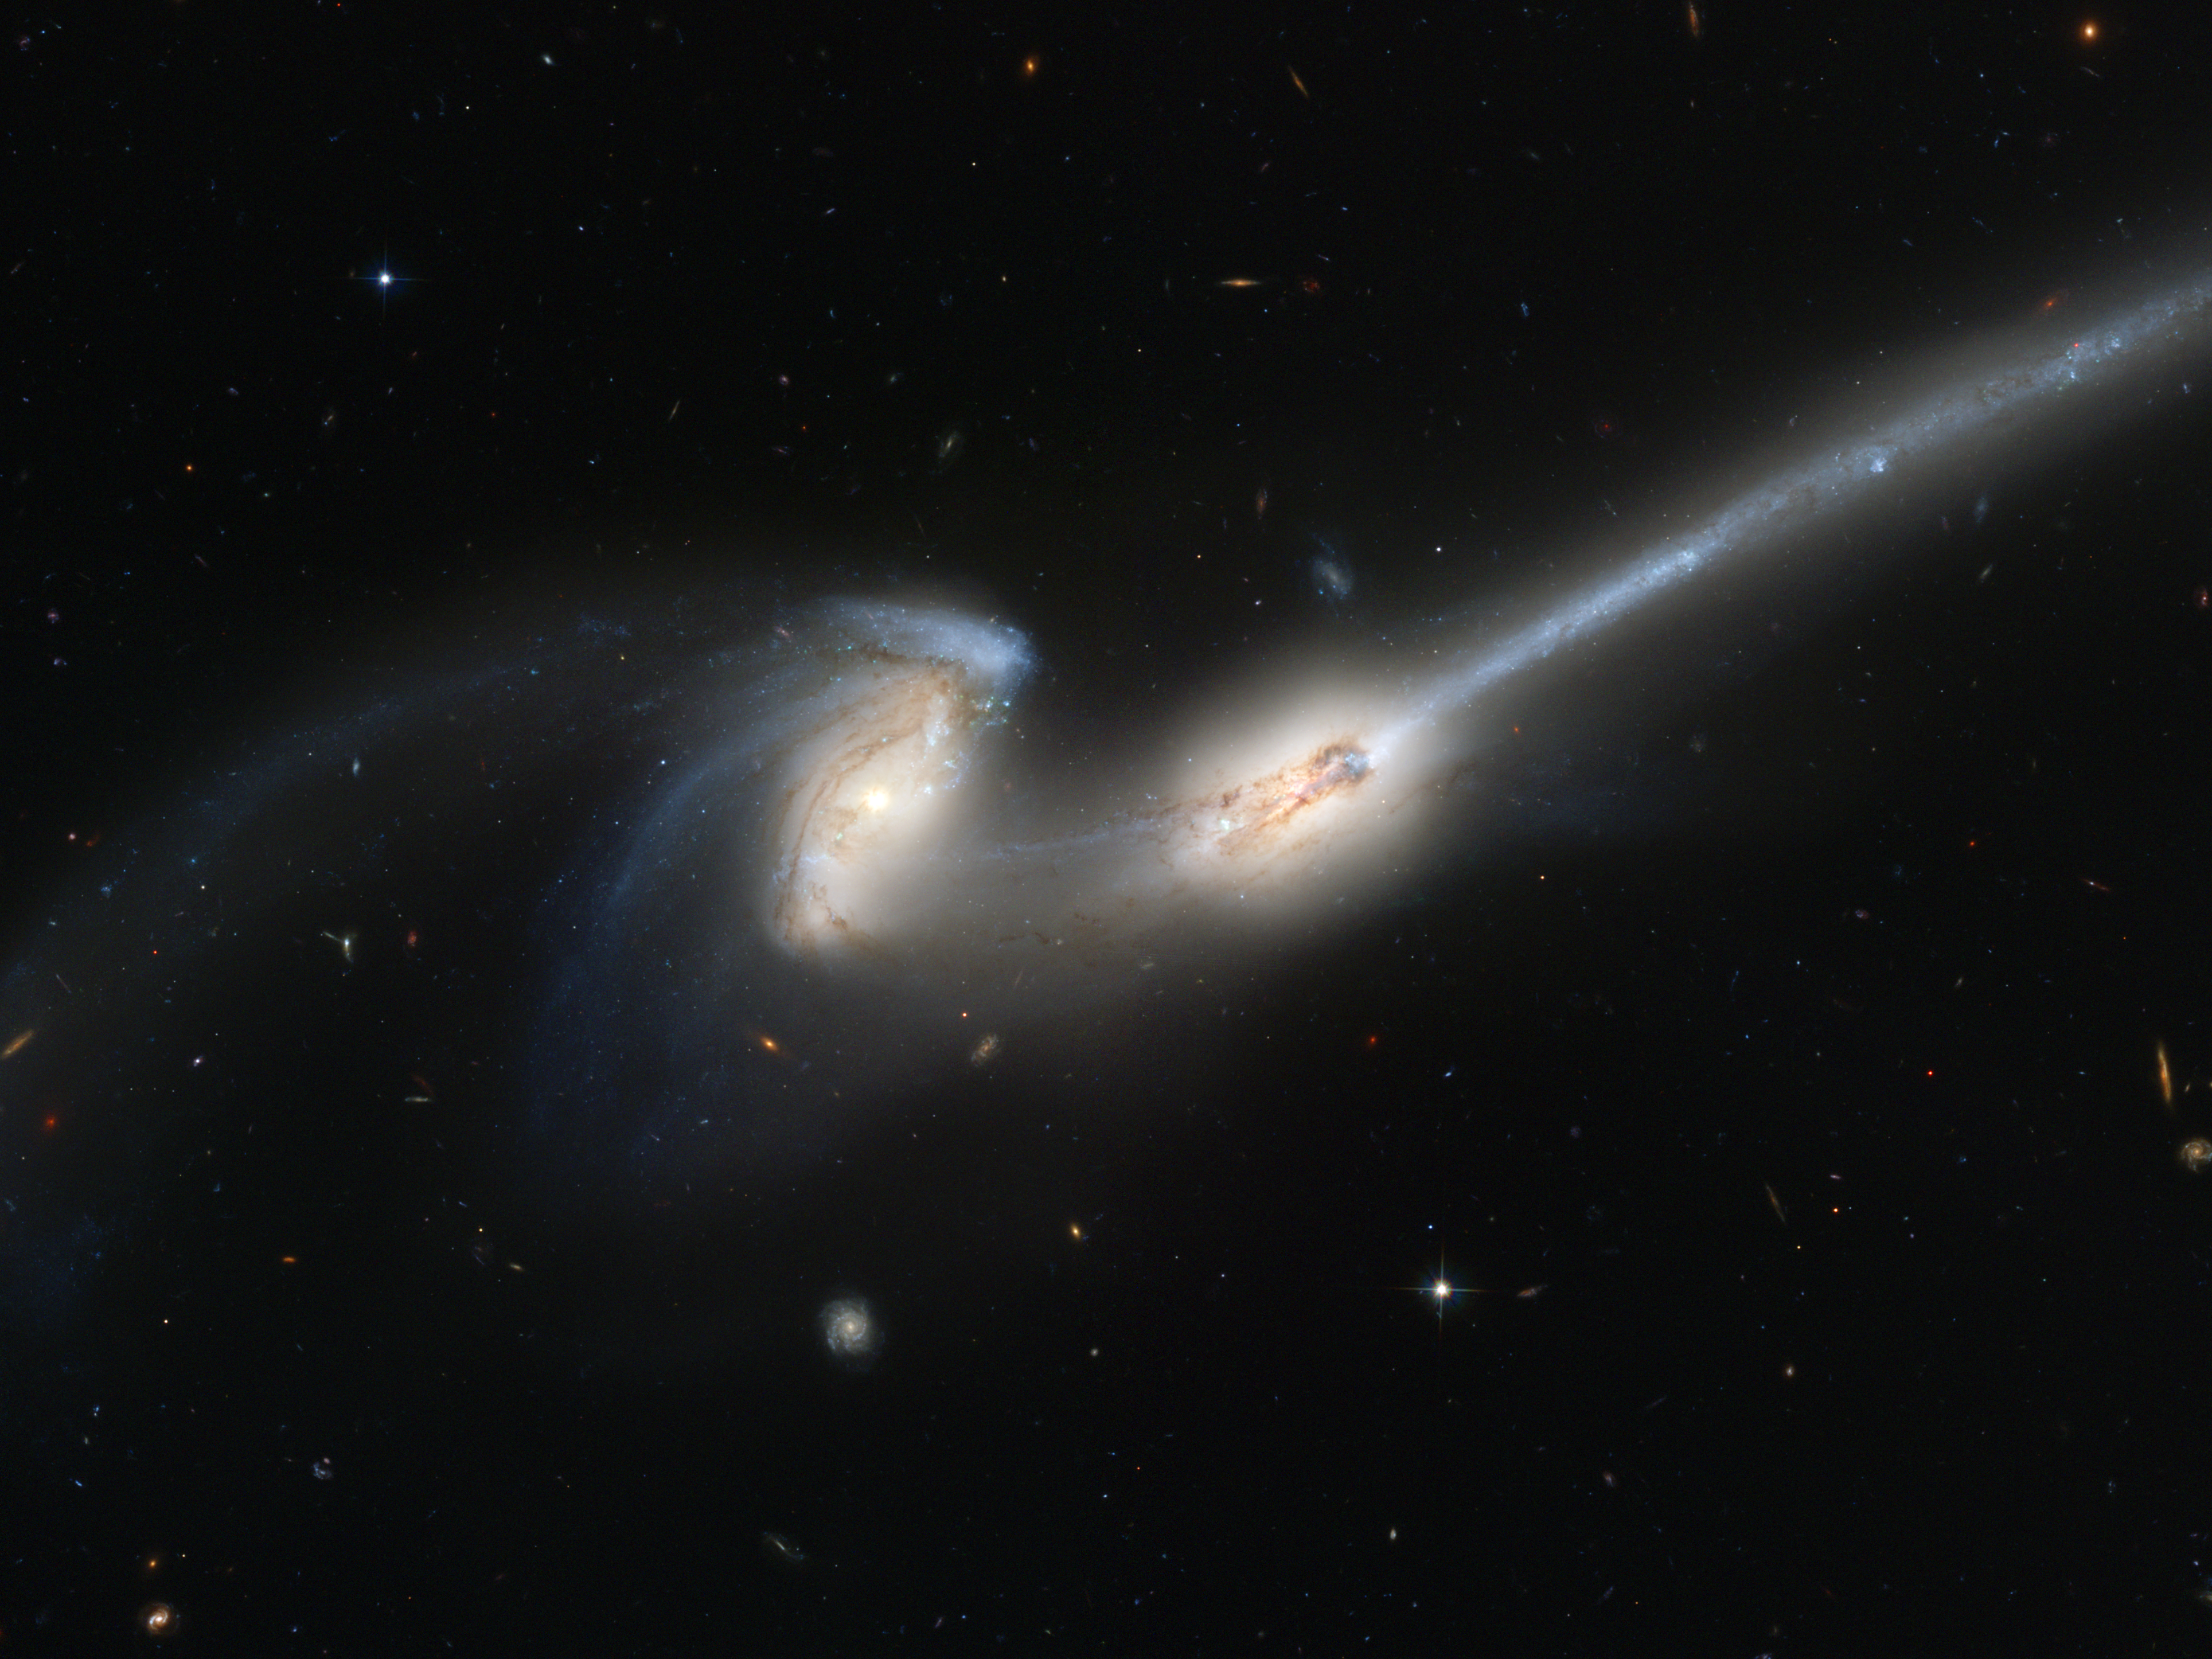

Hubble's newest camera takes a deep look at two merging galaxies

Advanced Camera for Surveys (ACS), the newest camera on NASA/ESA Hubble Space Telescope, has captured a spectacular pair of galaxies engaged in a celestial dance of cat and mouse or, in this case, mouse and mouse.

Located 300 million light-years away in the constellation Coma Berenices, the colliding galaxies have been nicknamed "The Mice" because of the long tails of stars and gas emanating from each galaxy. Otherwise known as NGC 4676, the pair will eventually merge into a single giant galaxy.

Credit: NASA, Holland Ford (JHU), the ACS Science Team and ESA